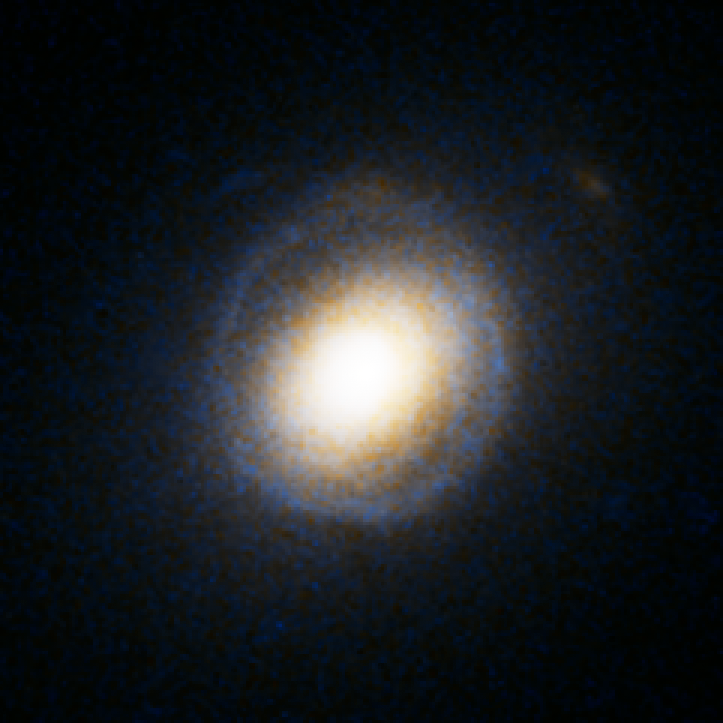

Einstein Ring Gravitational Lens: SDSS J232120.93-093910.2

This object is named SDSS J232120.93-093910.2. It is one of eight similar objects found by combining two powerful astronomical assets, the Sloan Digital Sky Survey (SDSS) and NASA's Hubble Space Telescope.

The objects are know as ‘Eienstein rings’ and are perhaps the most elegant manifestations of the gravitational lensing phenomina. Gravitational lensing occurs when the gravitational field from a massive object warps space and deflects light from a distant object behind it, allowing the distant object to be seen. Einstein rings are produced when two galaxies are almost perfectly aligned, one behind the other, giving an image like this with a reddish-white elliptical galaxy in the foreground and a thin ring of blue surrounding it — which is in fact the distorted light from another galaxy twice as far away.

Credit: NASA, ESA, A. Bolton (Harvard-Smithsonian CfA) and the SLACS Team